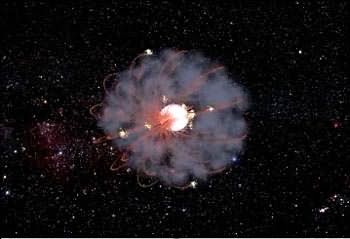

Magnetic star (artist's impression)

A "Magnetar" looms ominously, deep in the cosmos. Magnetars are Neutron Stars with extremely high magnetic fields.

Credit: NASA & ESA